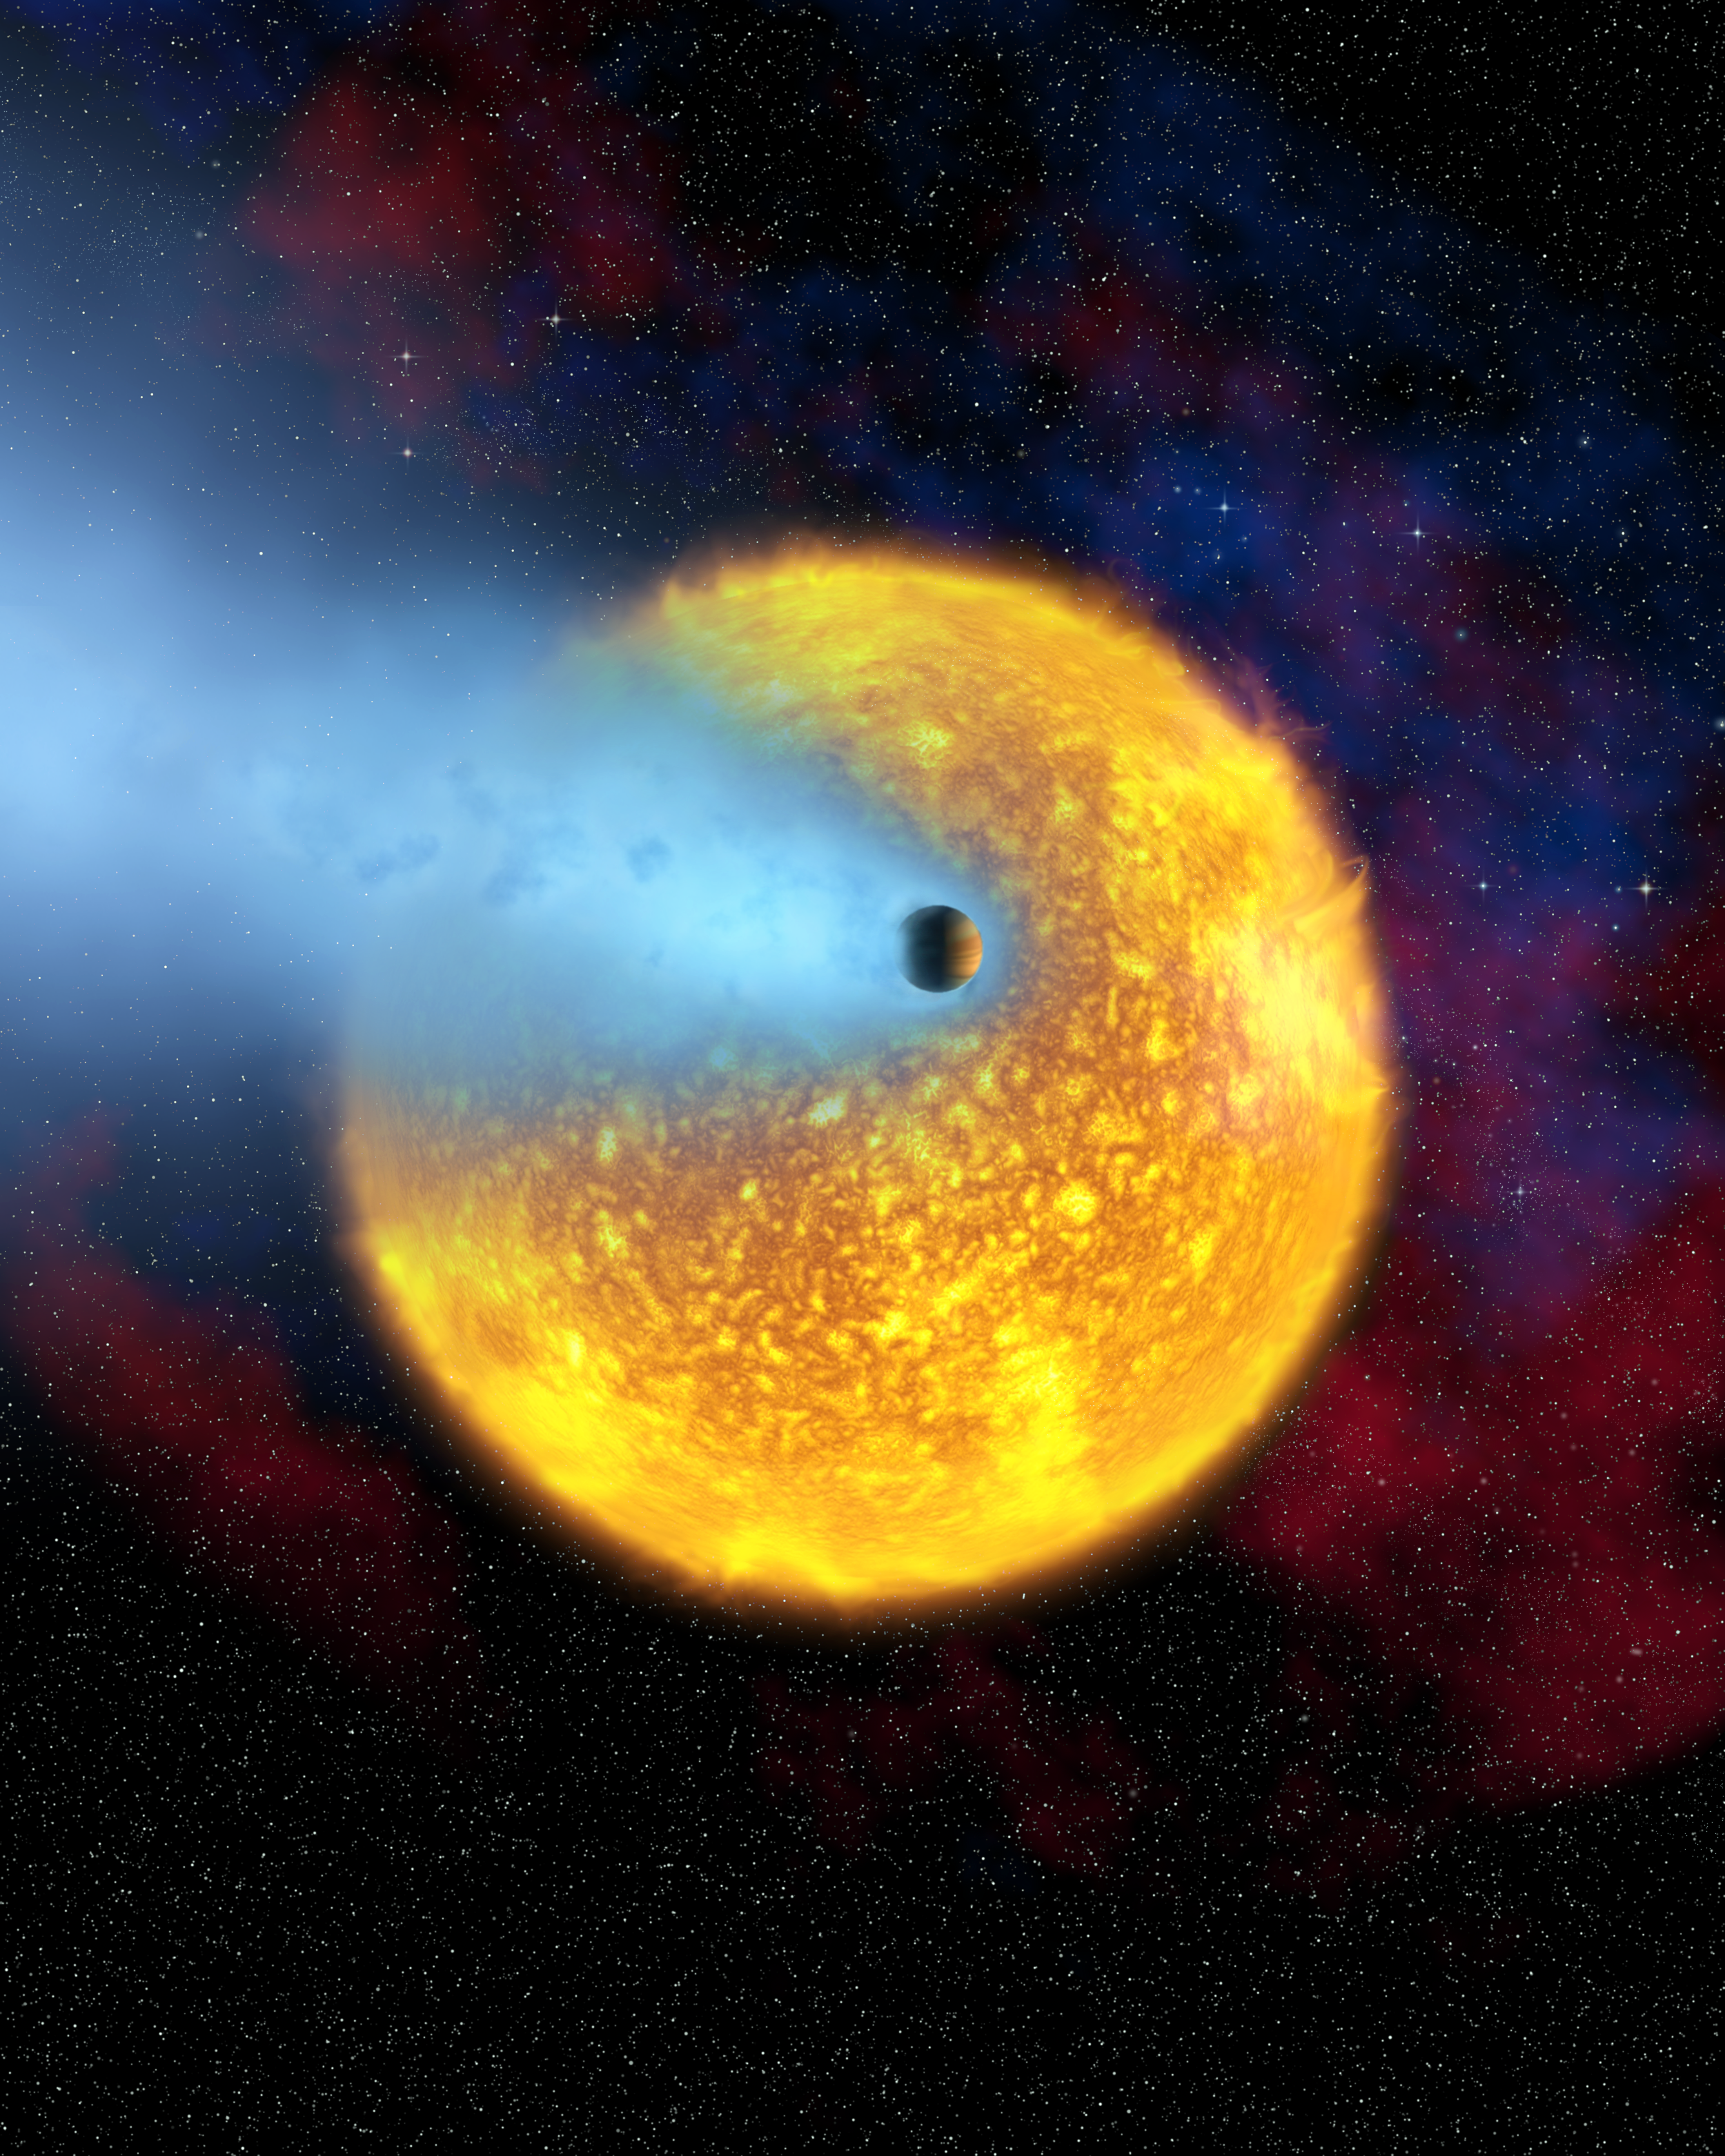

European astronomers observe first evaporating planet (artist's impression)

This artist's impression shows an overview of the transiting planet HD 209458b. Using the NASA/ESA Hubble Space Telescope, for the first time, astronomers have observed the atmosphere of an extrasolar planet evaporating off into space (shown in blue in this illustration). The planet's outer atmosphere is extended and heated so much by the nearby star that it starts to escape the planet's gravity. Hydrogen boils off in the planet's upper atmosphere under the searing heat from the star. HD 209458b belongs to a type of extrasolar planet known as 'hot Jupiters'. These planets orbit precariously close to their stars. They are giant, gaseous planets that must have formed in the cold outer reaches of the star system and then spiralled into their close orbits. This new discovery might help explain why 'hot Jupiters' so often orbit a few million kilometres from their parent stars. They are not usually found much closer than 7 million kilometres, as is the case for HD 209458b. Currently, the current closest distance is 5.7 million kilometres. Hot Jupiters have orbits that are as brief as 3 days, but not shorter. Perhaps the evaporation of the atmosphere plays a role in setting an inner boundary for orbits of hot Jupiters.

Credit: European Space Agency, Alfred Vidal-Madjar (Institut d'Astrophysique de Paris, CNRS, France) and NASA